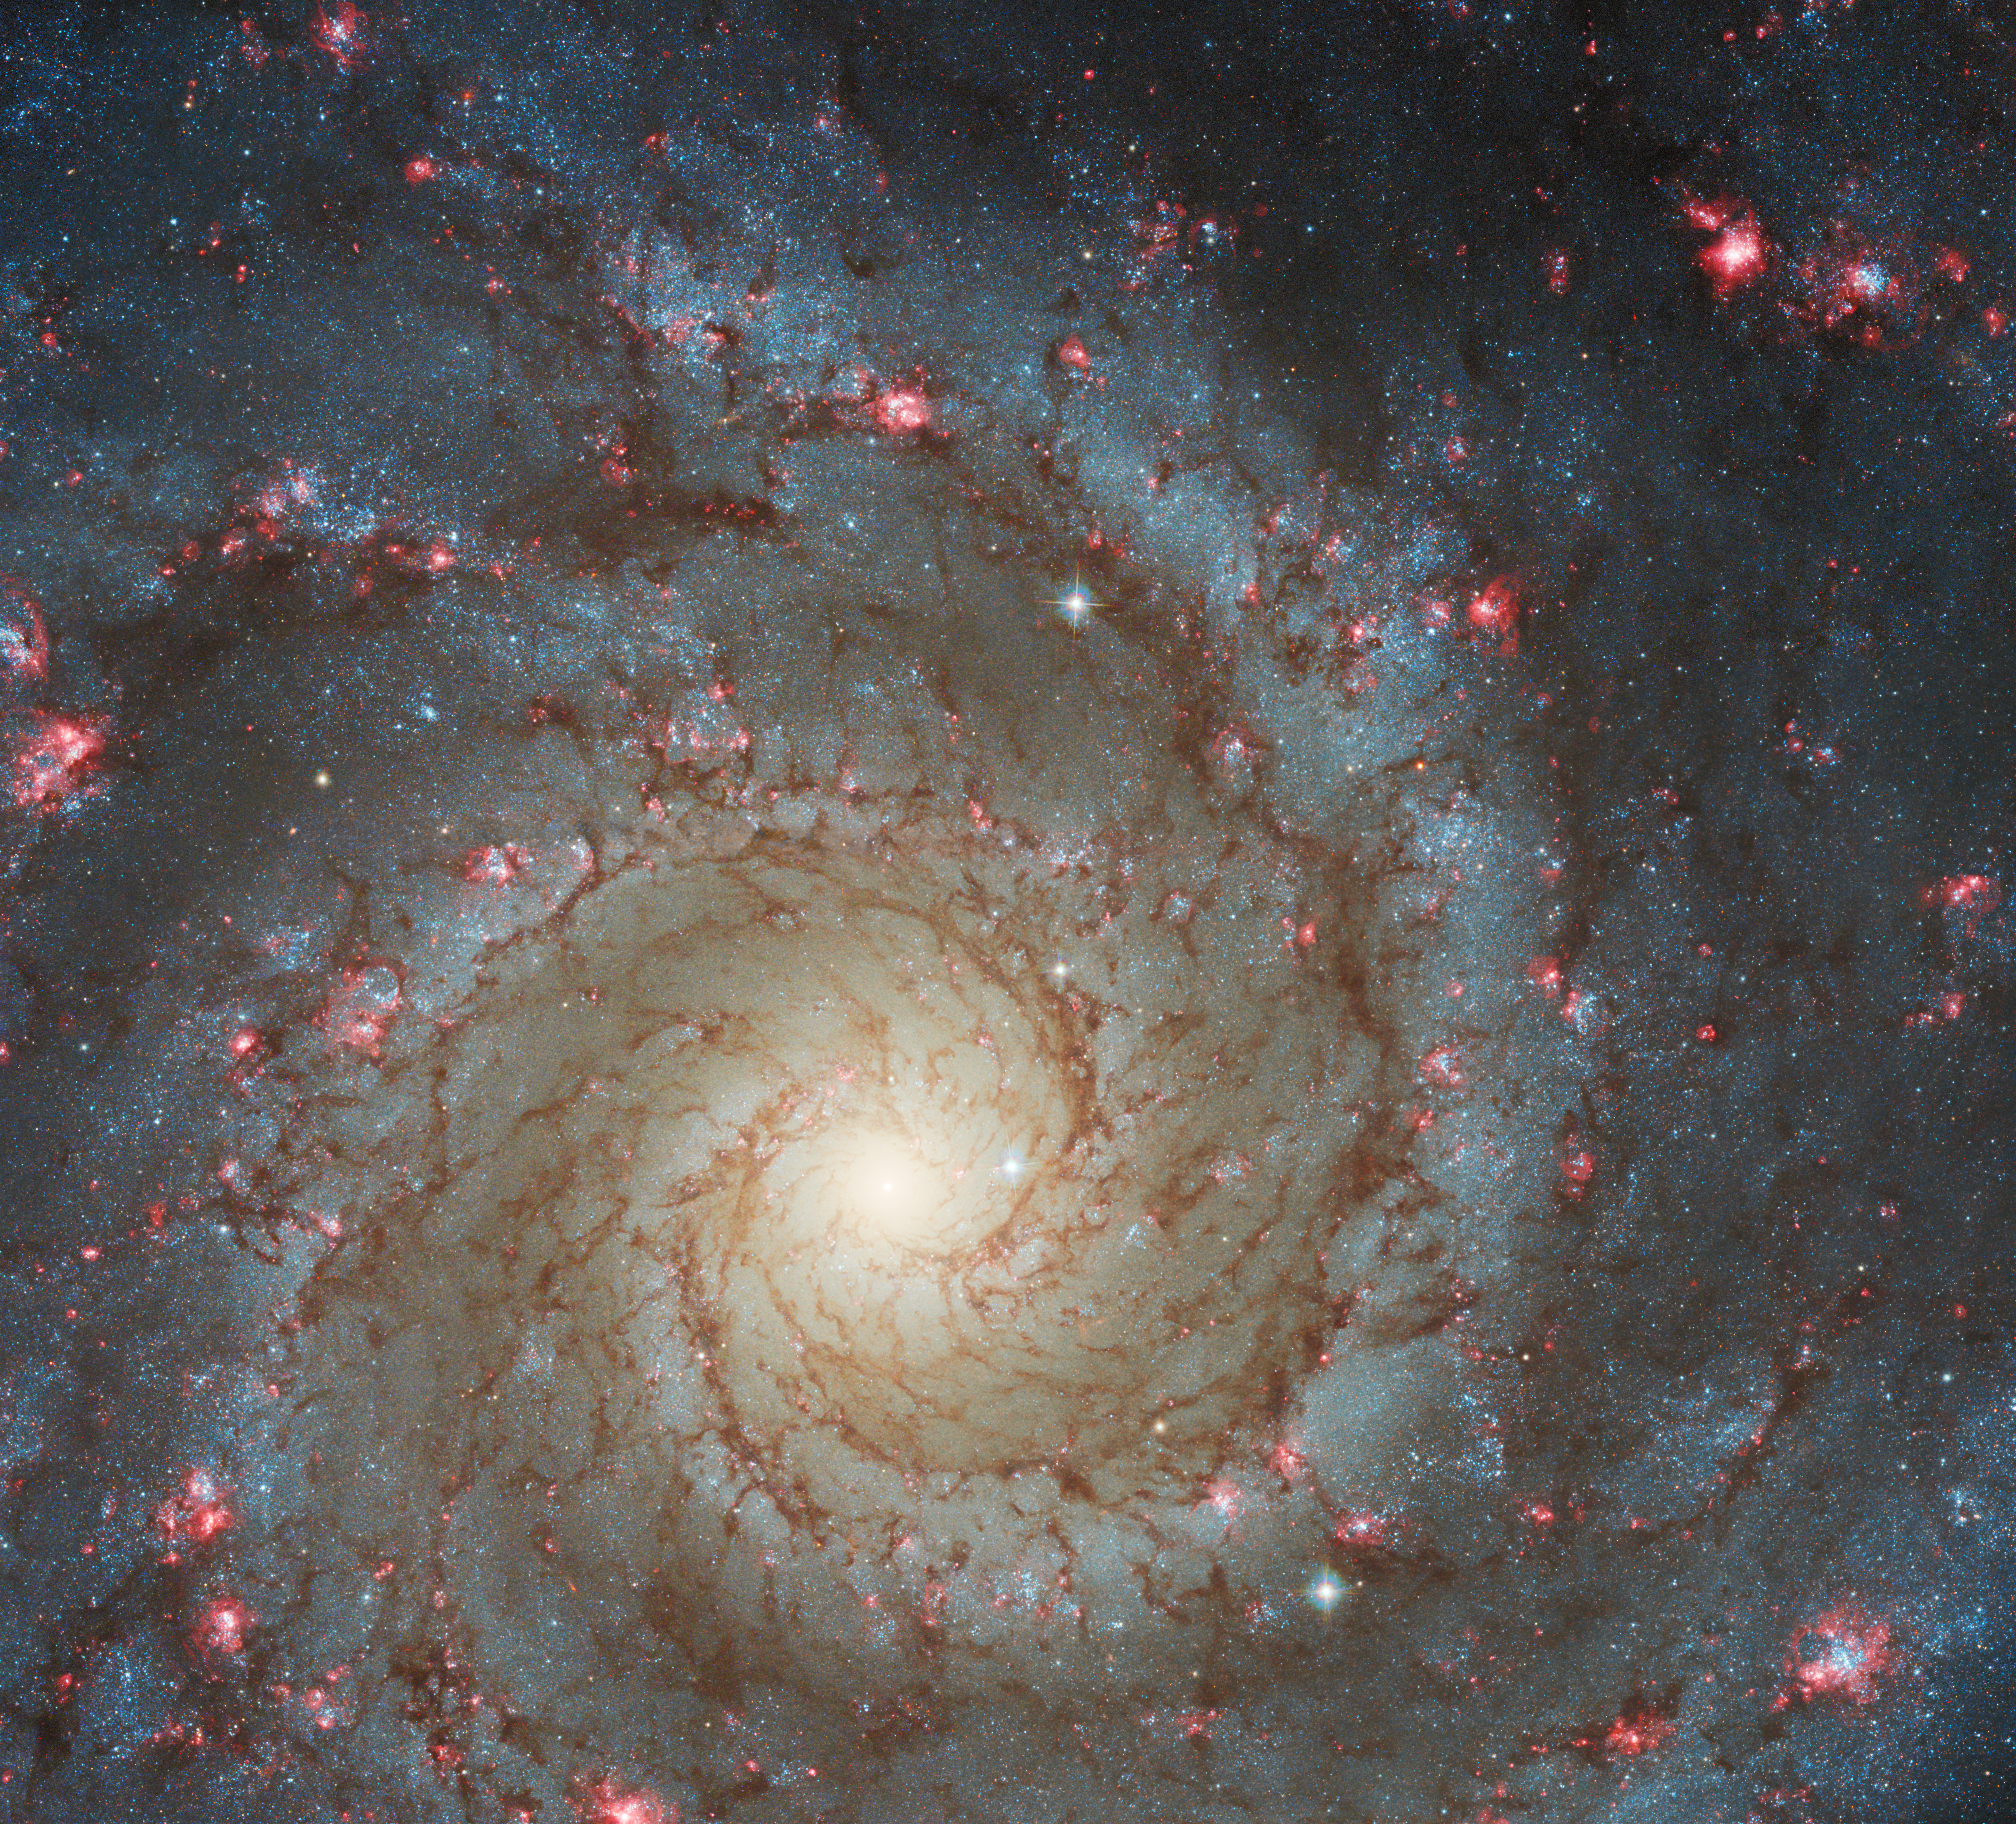

Hubble Gazes into M74

The arms of the spiral galaxy M74 are studded with rosy pink regions of fresh star formation in this image from the NASA/ESA Hubble Space Telescope. M74 — also known as the Phantom Galaxy — lies around 32 million light-years away from Earth in the constellation Pisces, and is a familiar sight for Hubble.
The beautiful reddish blooms that spread throughout M74 are huge clouds of hydrogen gas which are made to glow by the ultraviolet radiation from hot, young stars embedded within them. These regions — which astronomers refer to as H II regions — mark the location of recent star formation and are an important target for both space- and ground-based telescopes. Hubble’s Advanced Camera for Surveys, which collected the data in this image, even has a filter designed to pick out only this specific red wavelength of light!

The data in this image come from a set of observations exploring the evolution of local spiral galaxies such as M74, which aim to gain insights into the history of star formation in these spirals. To do this astronomers examined star clusters to date the different parts of spiral galaxies, enabling them to understand how the galaxies assembled over time. They also explored the distribution of dust in spiral galaxies; this dust is visible in this image as the dark threads winding along the spiral arms of M74.

Aside from their quest to understand the history of spiral galaxies, astronomers also observed M74 to complement observations from other telescopes. Combining observations of the same object from different telescopes across the electromagnetic spectrum gives astronomers far more insight than observations from a single telescope would. Hubble’s observations also paved the way for future instruments; M74 was one of the first targets of the powerful new NASA/ESA/CSA James Webb Space Telescope.

Credit: ESA/Hubble & NASA, R. Chandar